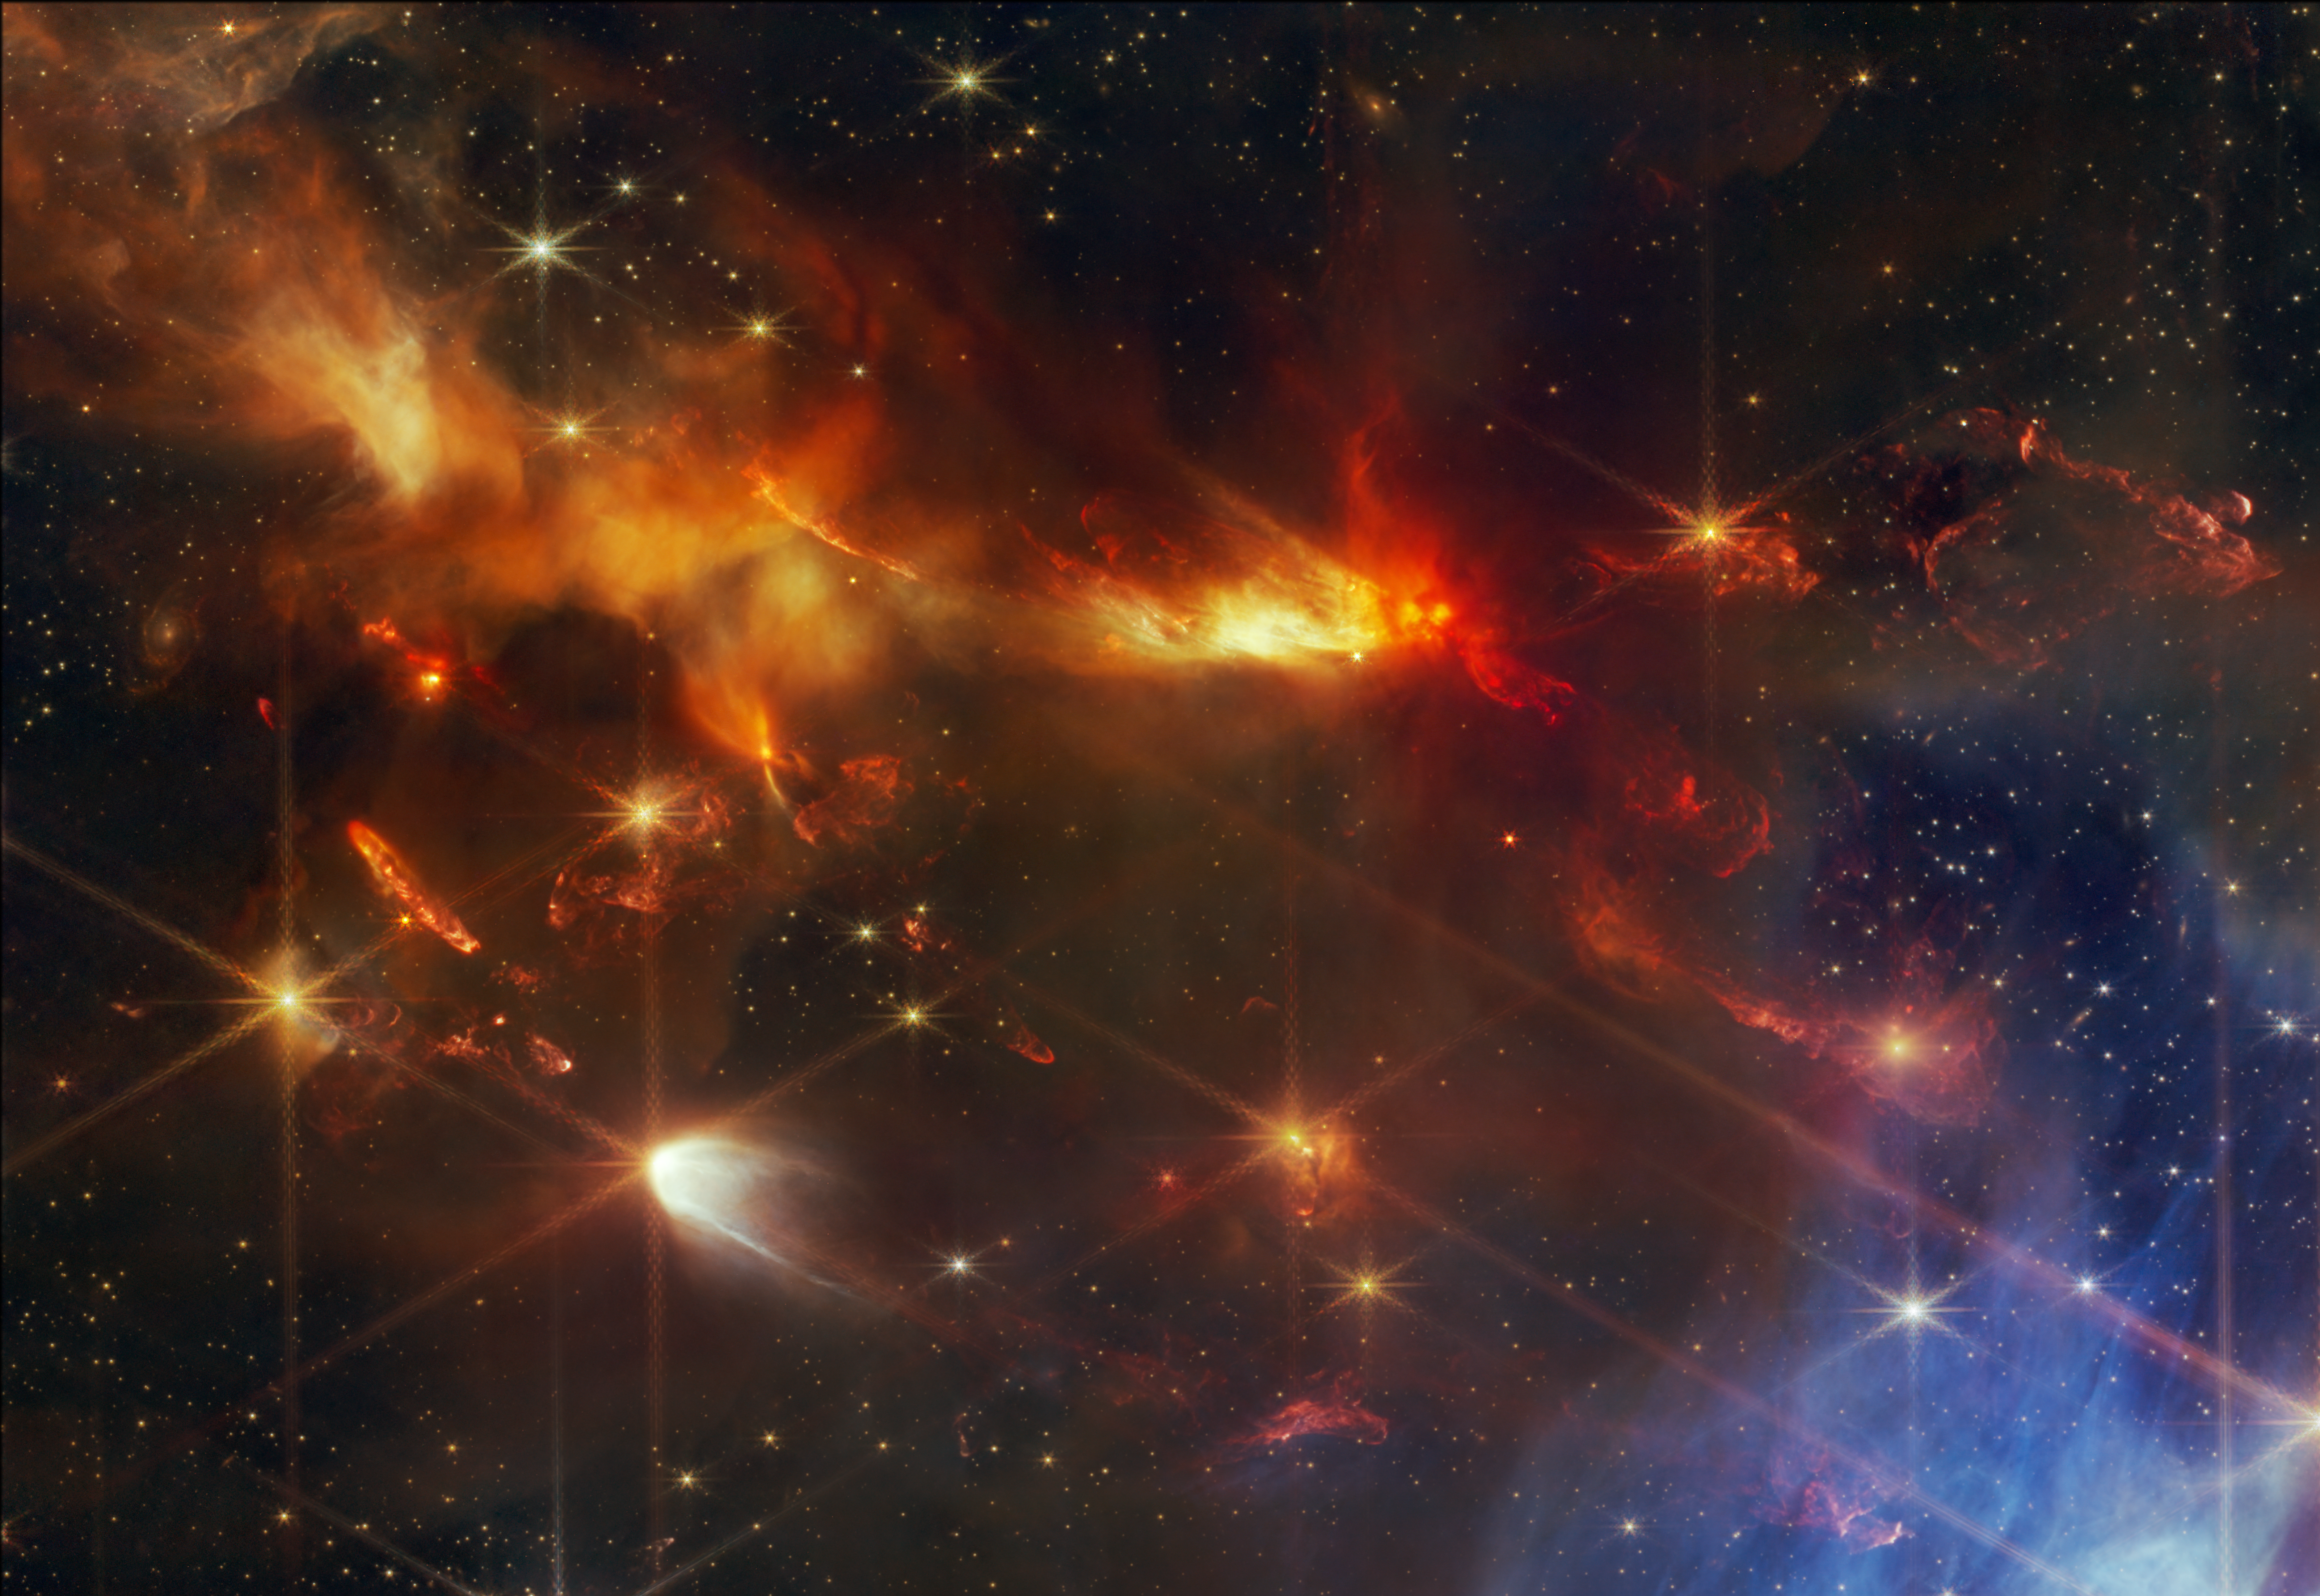

Serpens Nebula North – aligned outflows crop (NIRCam image)

This image from the NASA/ESA/CSA James Webb Space Telescope shows a portion of the Serpens Nebula, where astronomers have discovered a grouping of aligned protostellar outflows. These jets are signified by bright clumpy streaks that appear red, which are shock waves from the jet hitting surrounding gas and dust. Here, the red colour represents the presence of molecular hydrogen and carbon monoxide.

Typically these objects have a variety of orientations within one region. Here, however, they are all slanted in the same direction, to the same degree, like sleet pouring down during a storm. Researchers say the discovery of these aligned objects, made possible only by Webb’s exquisite spatial resolution and sensitivity at near-infrared wavelengths, is providing information about the fundamentals of how stars are born.

Credit: NASA, ESA, CSA, STScI, K. Pontoppidan (NASA’s Jet Propulsion Laboratory), J. Green (Space Telescope Science Institute)